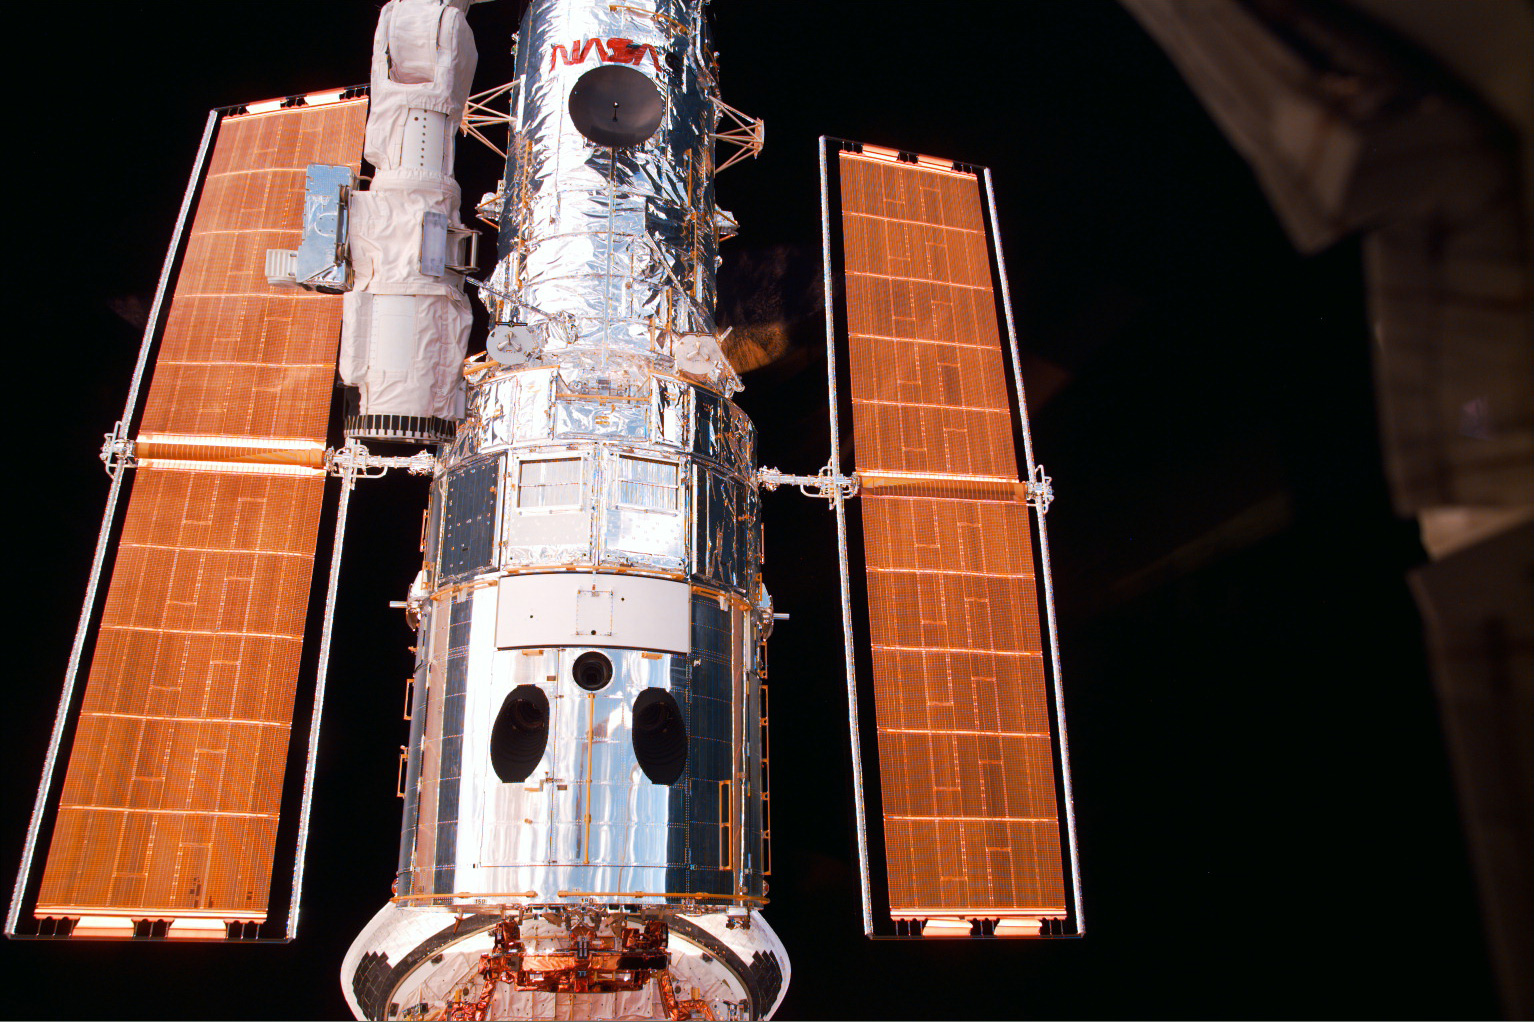

Hubble Space Telescope

A close-up image of the Hubble Space Telescope (HST).

Credit: NASA/ESA